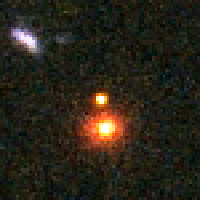

Distant Supernova 3 - After Outburst

Supernovae are extremely luminous and cause a burst of radiation that often briefly outshines an entire galaxy, before fading from view over several weeks or months. During this short interval a supernova can radiate as much energy as the Sun is expected to emit over its entire life span.

Credit: NASA/ESA and A. Riess (STScI)